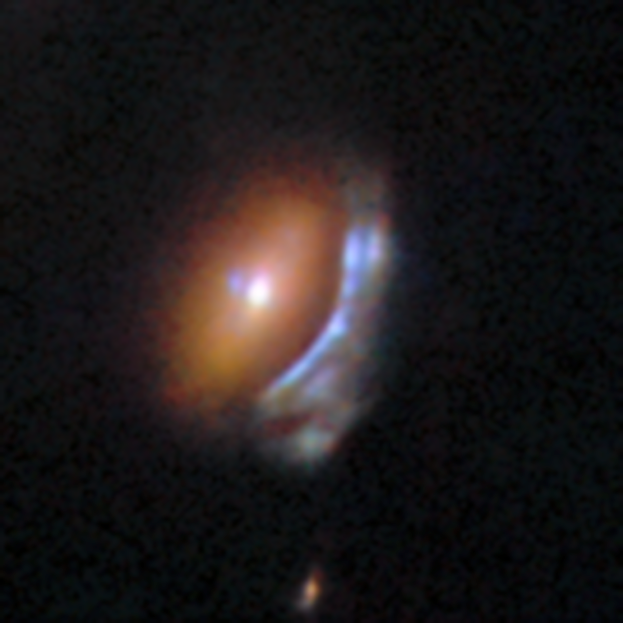

An anomaly from Hubble’s archive — Gravitational lens 2

This is a previously-undiscovered astrophysical anomaly, found in the Hubble Space Telescope’s archive by researchers using a new AI-assisted method. The AI tool allowed them to sift through nearly 100 million image cutouts in just days, turning up rare and anomalous objects like this one.

Two dramatically different galaxies are revealed in this Hubble image. A compact, reddish elliptical galaxy is accompanied by a blue spiral galaxy squashed into an arc shape. This is the result of gravitational lensing, where light from the spiral galaxy — actually residing in the background — has been bent by the mass of the heavy elliptical galaxy, creating this distorted image of the spiral.

Read more about this new research here.

Credit: ESA/Hubble & NASA, D. O’Ryan, P. Gómez (European Space Agency), M. Zamani (ESA/Hubble)